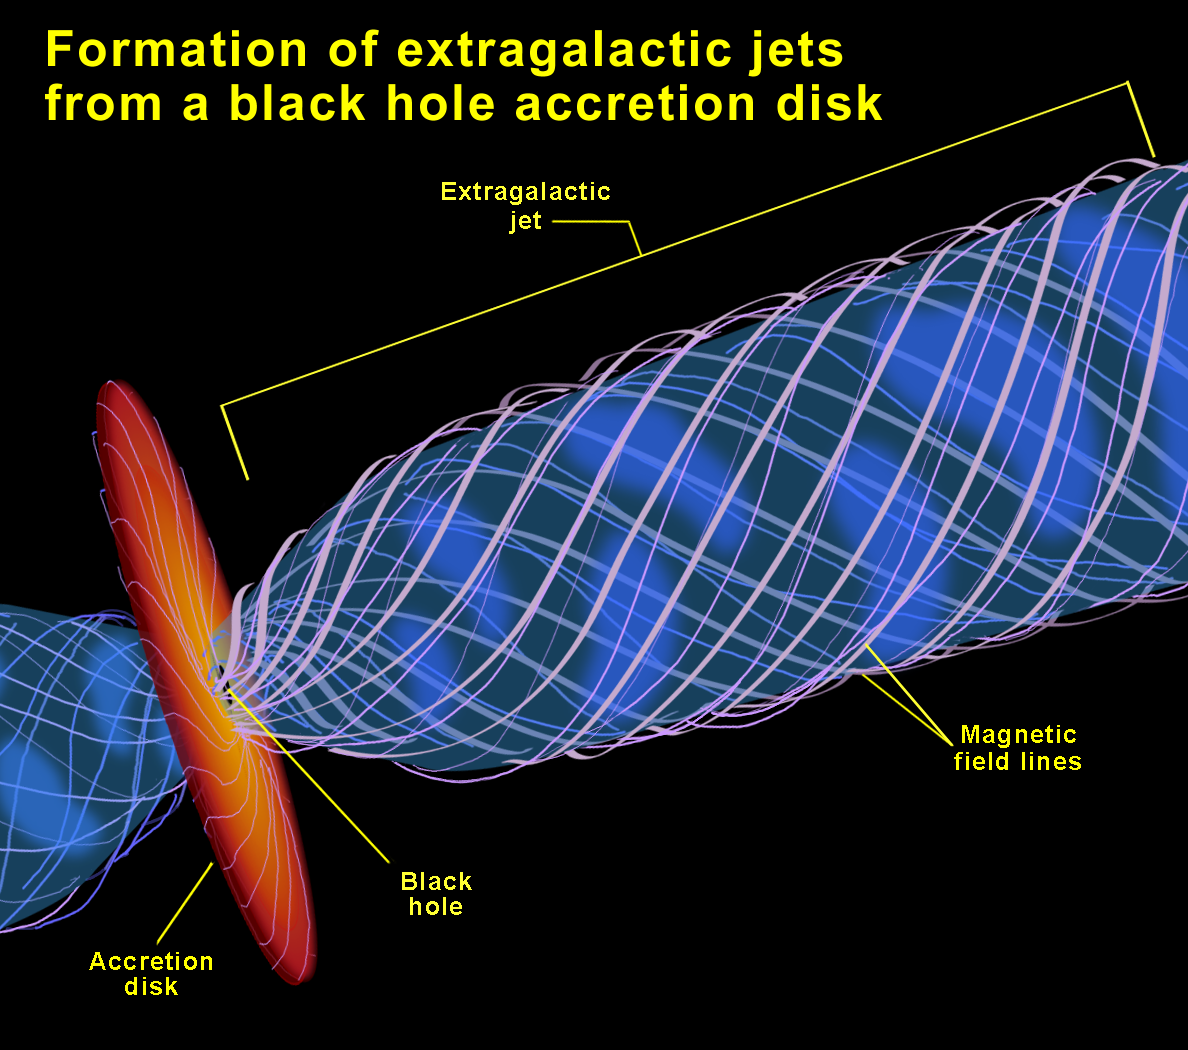

Formation of extragalactic jets from a black hole accretion disk

Artist's concept of the formation region of M 87's jet. An accretion disk (red-yellow) surrounds the black hole, and its magnetic field lines twist tightly to channel the outpouring subatomic particles into a narrow jet. The jet opens widely near the black hole, then is shaped into a narrower beam within a light-year of the black hole.

Credit: NASA/ESA and Ann Feild ( Space Telescope Science Institute)